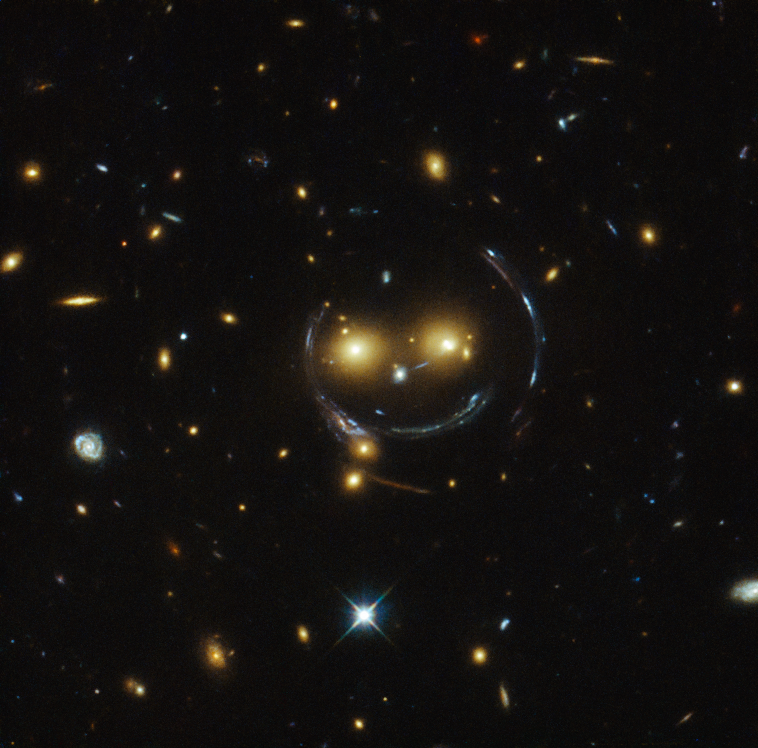

A smiling lens

In the centre of this image, taken with the NASA/ESA Hubble Space Telescope, are two faint galaxies that seem to be smiling.

You can make out two orange eyes and a white button nose. In the case of this “happy face”, the two eyes are the galaxies SDSSCGB 8842.3 and SDSSCGB 8842.4 and the misleading smile lines are actually arcs caused by an effect known as strong gravitational lensing.

Massive structures in the Universe exert such a powerful gravitational pull that they can warp the spacetime around them and act as cosmic lenses which can magnify, distort and bend the light behind them. This phenomenon, crucial to many of Hubble’s discoveries, can be explained by Einstein’s theory of general relativity.

In this special case of gravitational lensing, a ring — known as an Einstein Ring — is produced from this bending of light, a consequence of the exact and symmetrical alignment of the source, lens and observer and resulting in the ring-like structure we see here.

Hubble has provided astronomers with the tools to probe these massive galaxies and model their lensing effects, allowing us to peer further into the early Universe than ever before. This object was studied by Hubble’s Wide Field and Planetary Camera 2 (WFPC2) and Wide Field Camera 3 (WFC3) as part of a survey of strong lenses.

A version of this image was entered into the Hubble’s Hidden Treasures image processing competition by contestant Judy Schmidt.

Credit: NASA & ESA
Acknowledgement: Judy Schmidt (geckzilla.org)